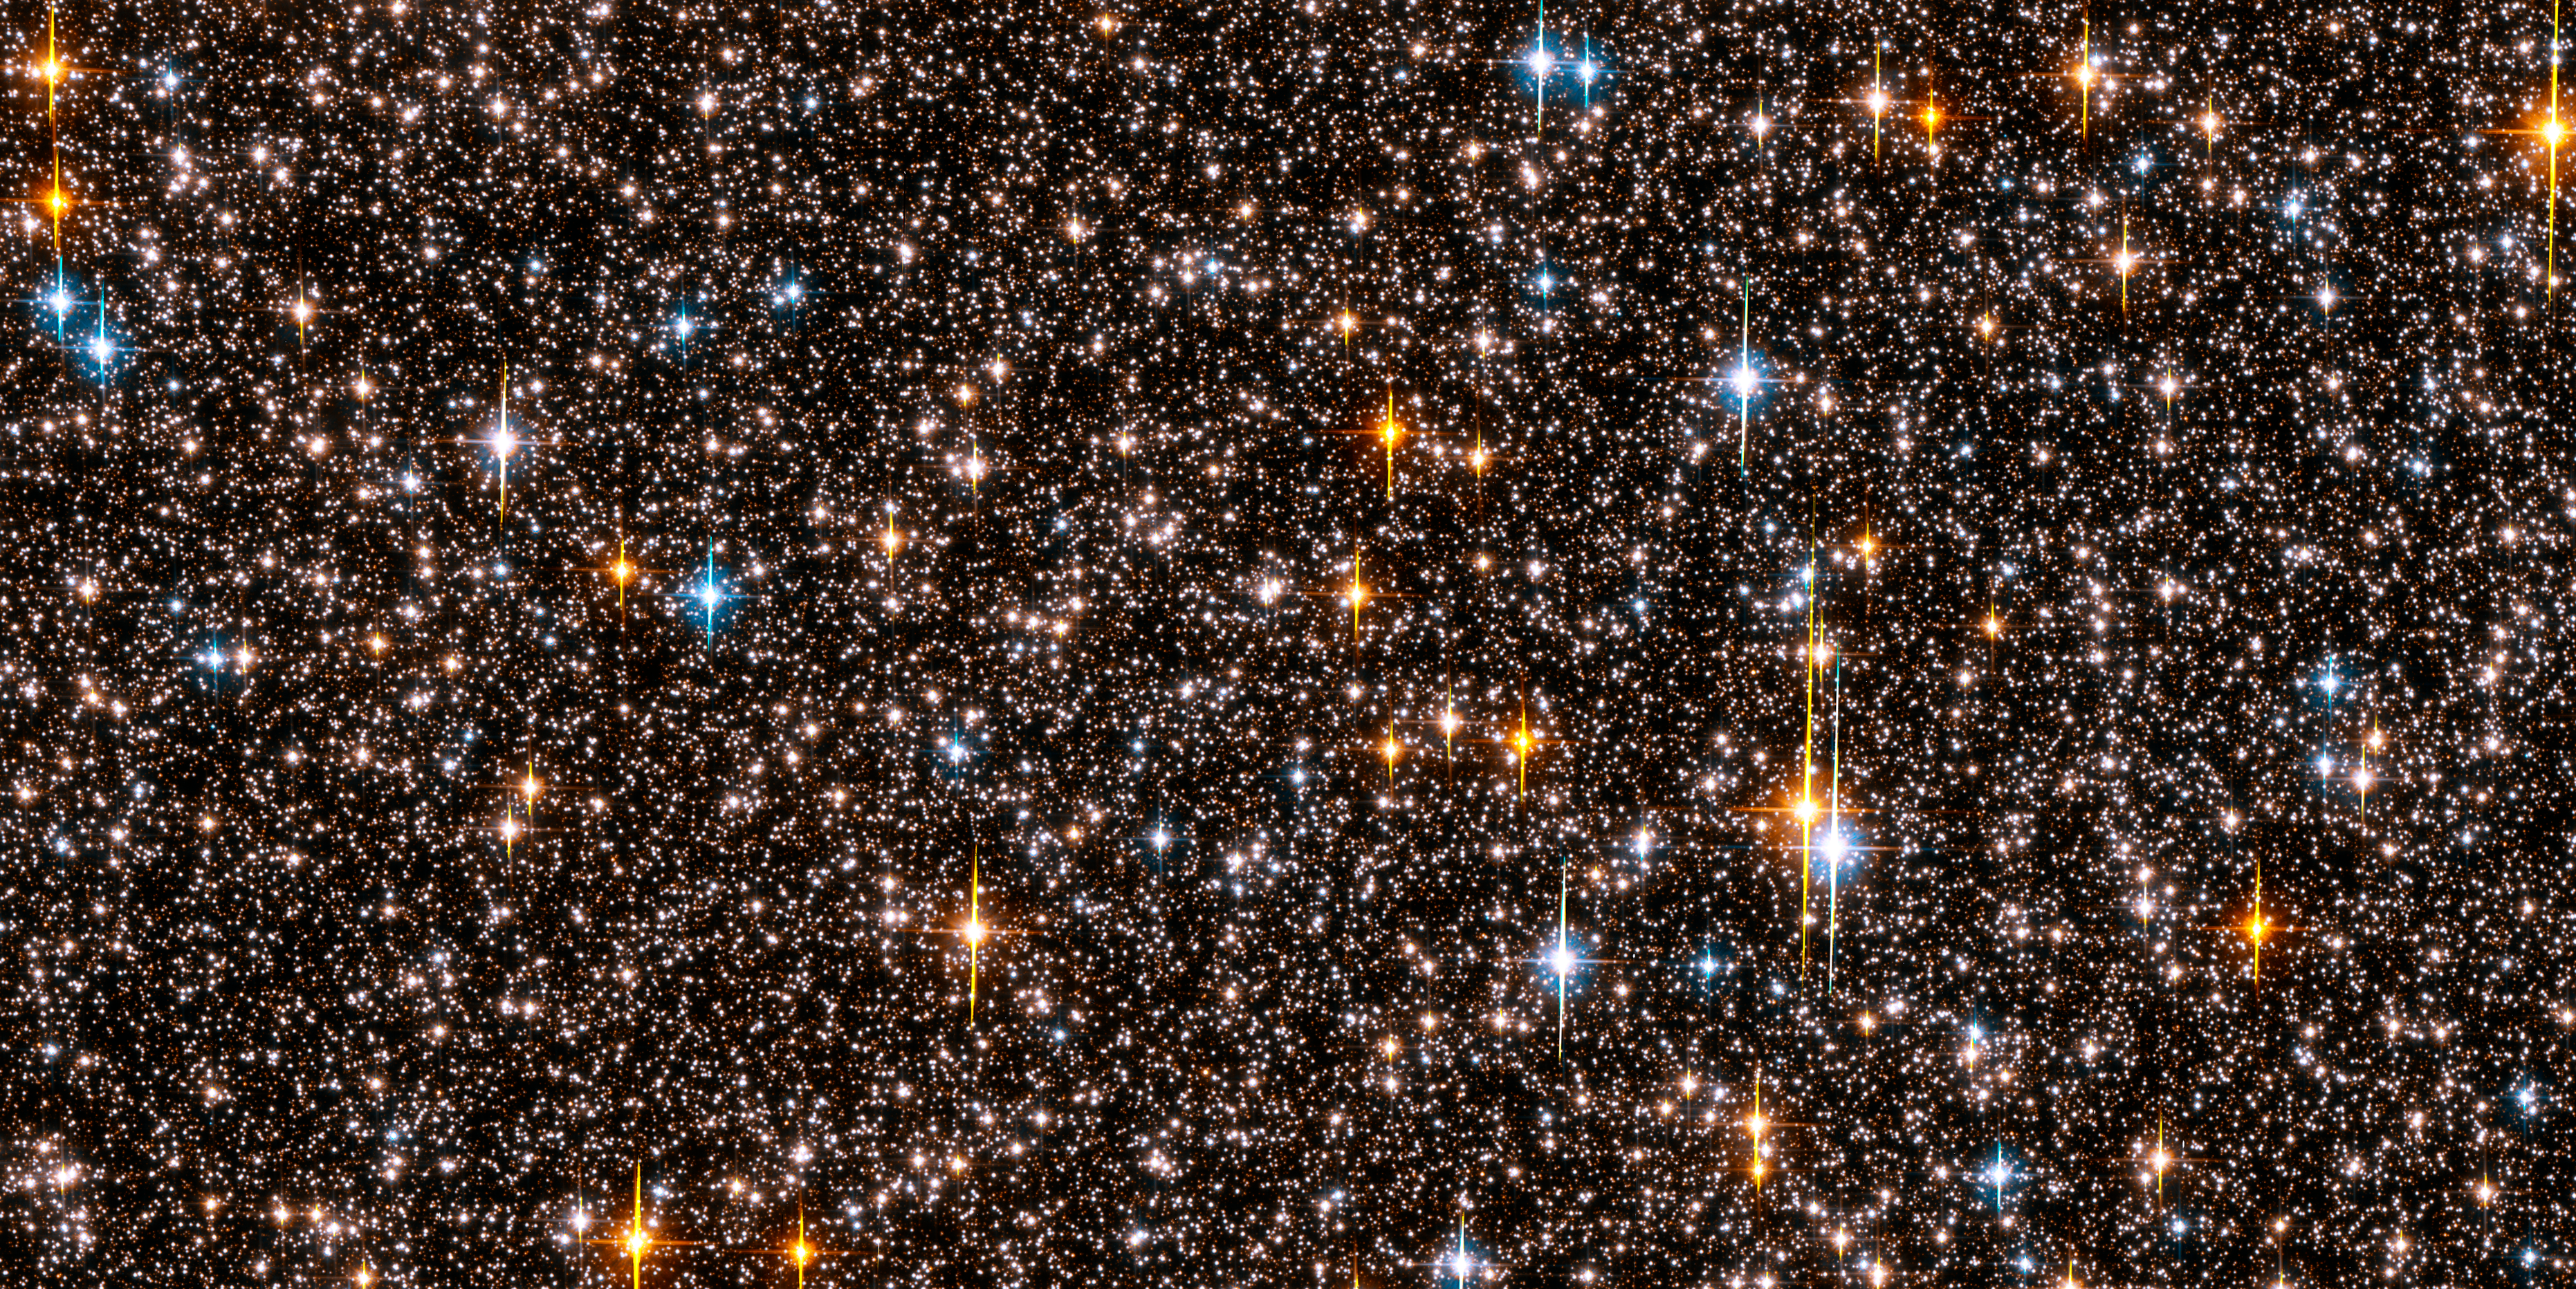

Hubble extrasolar planet search field in Sagittarius [full ACS view]

This is an image of one-half of the Hubble Space Telescope field of view in the Sagittarius Window Eclipsing Extrasolar Planet Search (SWEEPS). The field contains approximately 150,000 stars, down to 30th magnitude. The stars in the Galactic disk and bulge have a mixture of colours and masses. The field is so crowded with stars because Hubble was looking across 26,000 light-years of space in the direction of the centre of our Galaxy.

Half of these stars are bright enough for Hubble to monitor for any small, brief and periodic dips in brightness caused by the passage of an extrasolar planet passing in front of the star, an event called a transit. Hubble took approximately 520 pictures of this field, at red and blue wavelengths, 22 to 29 February, 2004. Hubble identified 16 candidate stars that are orbited by planets with periods of a few days. Planets so close to their stars with such short orbital periods are called "hot Jupiters."

These are considered "candidate" extrasolar planets because most of them are too faint to allow for spectroscopic observations that would allow for a precise measure of the planet's mass.

Credit: NASA, ESA, K. Sahu (STScI) and the SWEEPS science team